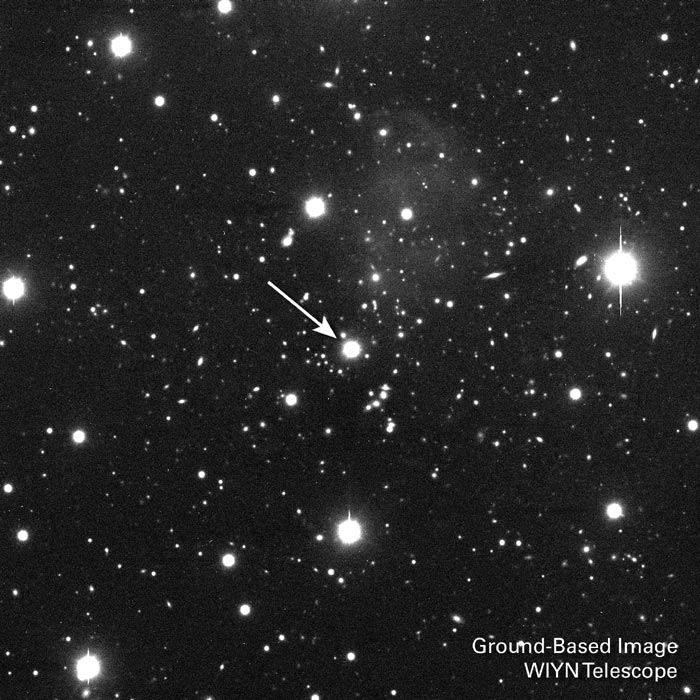

A distant quasar's brilliant light

The arrow in this image, taken by a ground-based telescope, points to a distant quasar the brilliant core of an active galaxy residing billions of light-years from Earth. As light from this faraway object travels across space, it picks up information on galaxies and the vast clouds of material between galaxies as it moves through them. The Space Telescope Imaging Spectrograph aboard NASA/ESA Hubble Space Telescope decoded the quasar's light to find the spectral "fingerprints" of highly ionized (energized) oxygen, which had mixed with invisible clouds of hydrogen in intergalactic space. The quasar's brilliant beam pierced at least four separate filaments of the invisible hydrogen laced with the telltale oxygen. The presence of oxygen between the galaxies implies there are huge quantities of hydrogen in the universe.

Credit: WIYN Telescope at Kitt Peak National Observatory in Arizona. The telescope is owned and operated by the University of Wisconsin, Indiana University, Yale University, and the National Optical Astronomy Observatories.